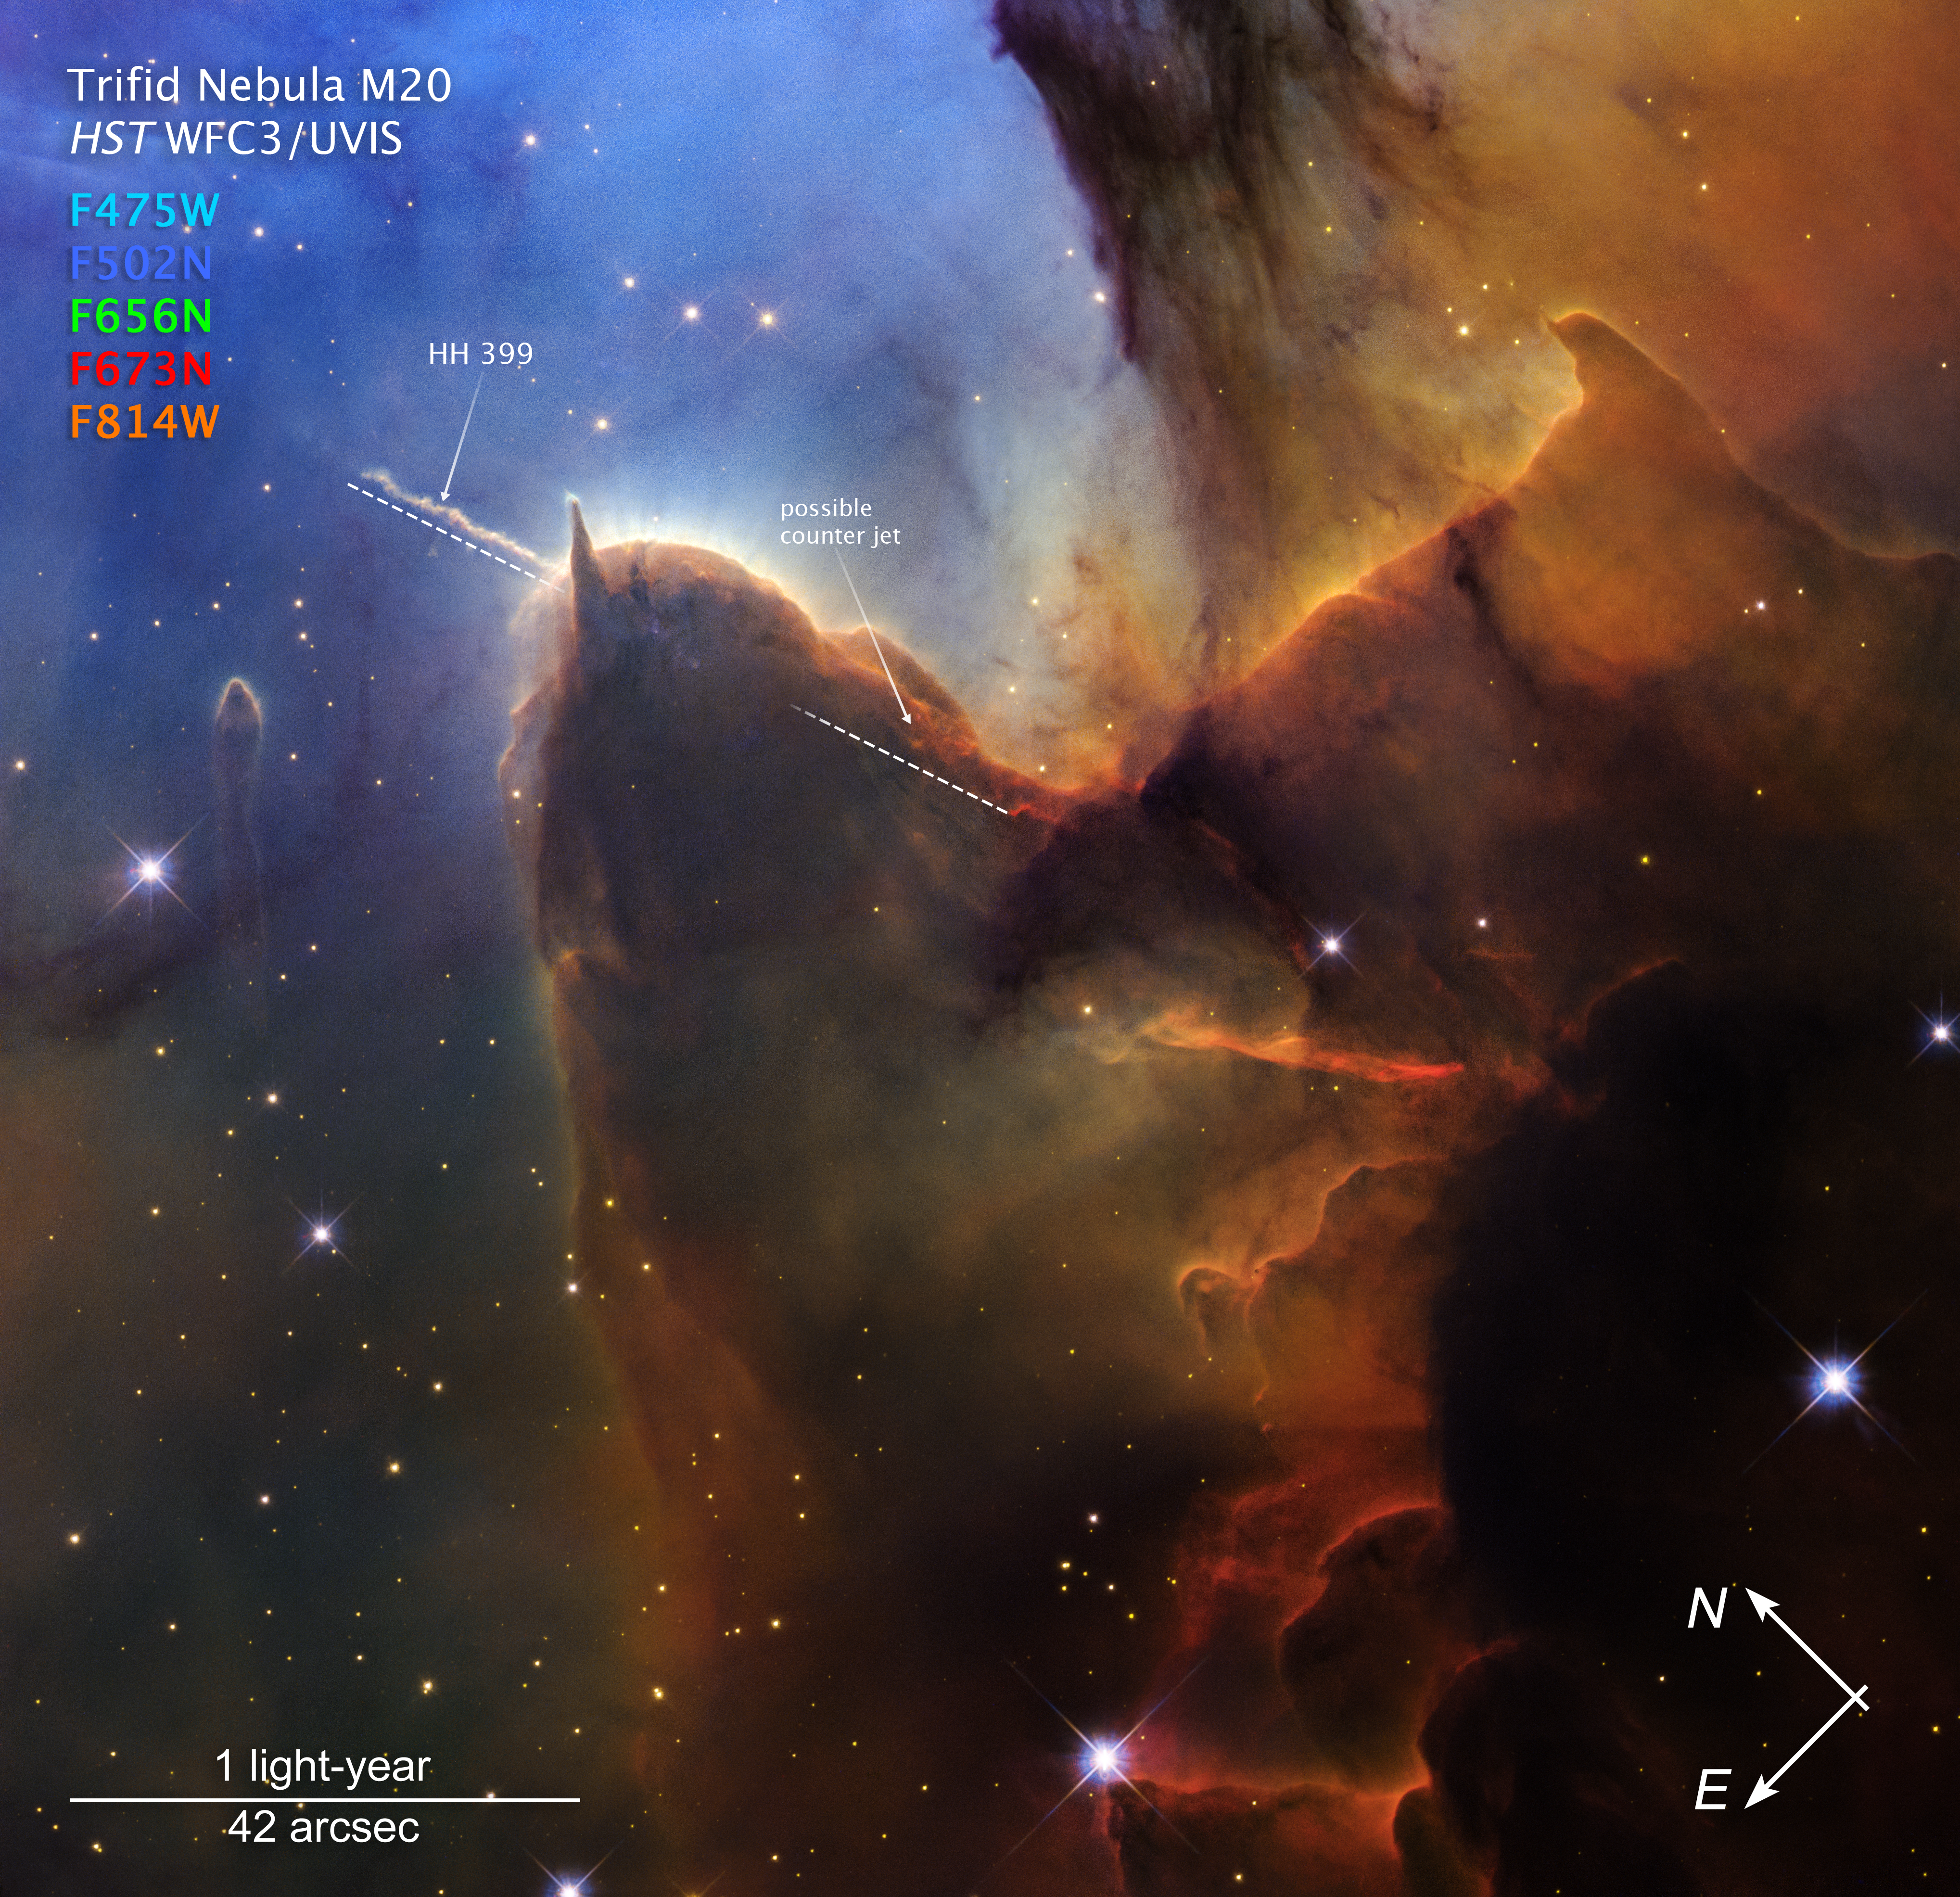

Trifid Nebula (annotated)

This closeup image of the Trifid Nebula (Messier 20 or M20) captured by the NASA/ESA Hubble Space Telescope’s Wide Field Camera 3 (WFC3) shows compass arrows, scale bar, and colour key for reference.

A jet of plasma ejected by a young protostar embedded in the brown dust, known as Herbig-Haro 399 (HH 399) is labeled, along with its suspected counter jet.

The north and east compass arrows show the orientation of the image on the sky. Note that the relationship between north and east on the sky (as seen from below) is flipped relative to direction arrows on a map of the ground (as seen from above).

At the bottom left, the scale bar is labeled in light-years, which is the distance that light travels in one Earth-year (it takes one year for light to travel a distance equal to the length of the scale bar). One light-year is equal to about 9.46 trillion kilometers.

At the bottom, the scale bar is labeled in arcseconds, a measure of angular distance on the sky. One arcsecond is equal an angular measurement of 1/3600 of one degree. There are 60 arcminutes in a degree and 60 arcseconds in an arcminute (the full Moon has an angular diameter of about 30 arcminutes). The actual size of an object that covers one arcsecond on the sky depends on its distance from the telescope.

This image shows visible wavelengths of light that have been translated into visible-light colours. The colour key shows which WFC3 filters were used when collecting the light. The colour of each filter name is the visible light colour used to represent the visible light that passes through that filter.

Credit: NASA, ESA, STScI